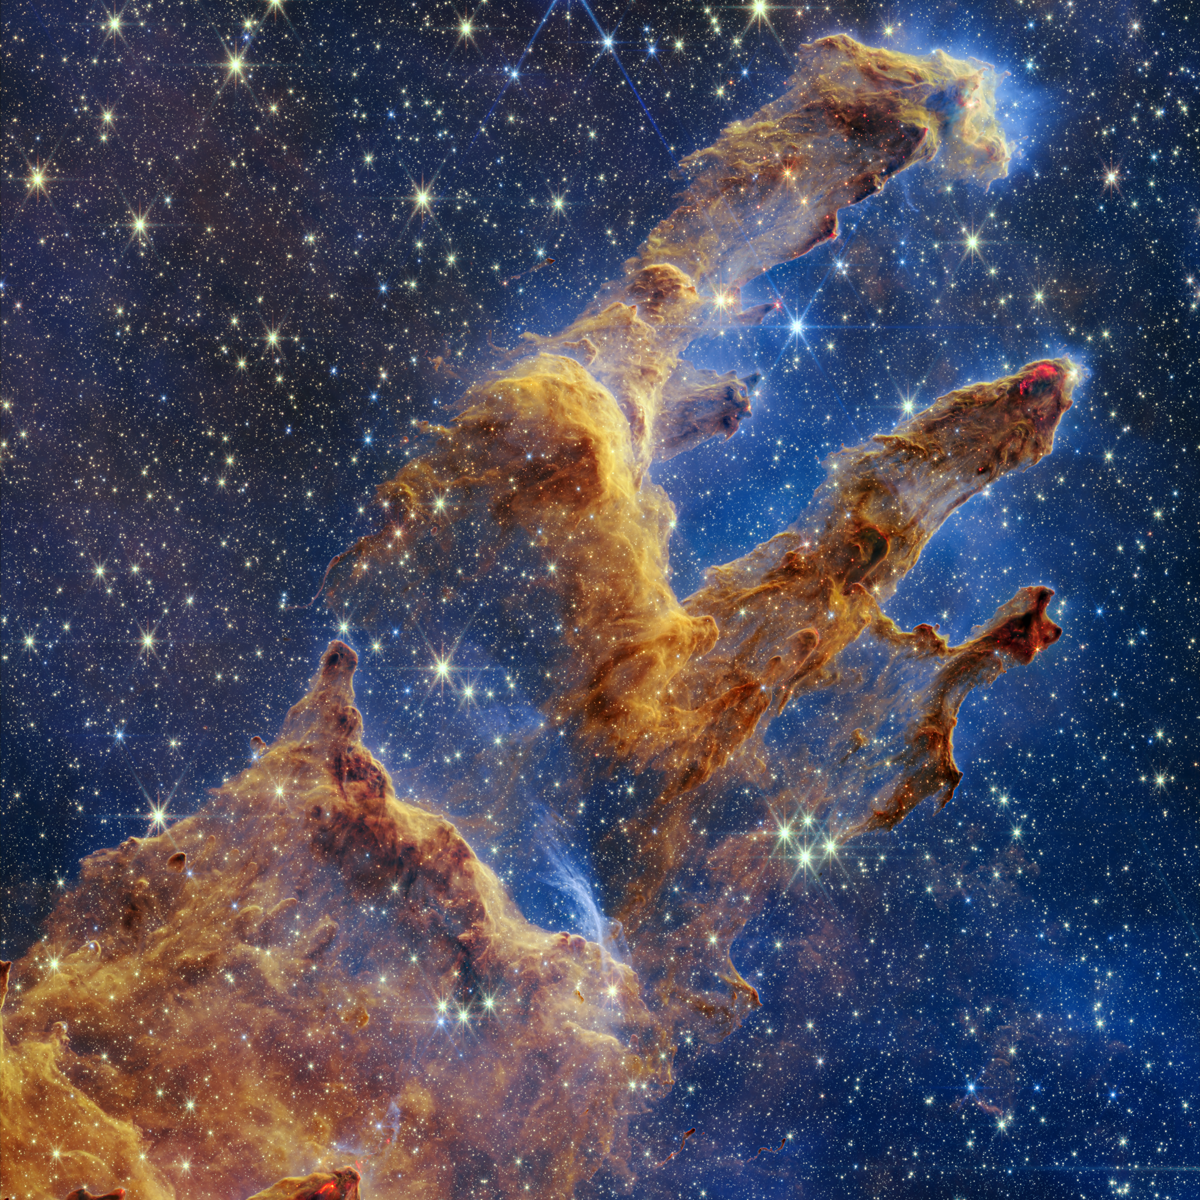

Webb Takes a Stunning, Star-Filled Portrait of the Pillars of Creation (Cropped)

The Pillars of Creation are set off in a kaleidoscope of colour in the NASA/ESA/CSA James Webb Space Telescope’s near-infrared-light view. The pillars look like arches and spires rising out of a desert landscape, but are filled with semi-transparent gas and dust, and ever changing. This is a region where young stars are forming – or have barely burst from their dusty cocoons as they continue to form.

Protostars are the scene-stealers in this Near-Infrared Camera (NIRCam) image. These are the bright red orbs that sometimes appear with eight diffraction spikes. When knots with sufficient mass form within the pillars, they begin to collapse under their own gravity, slowly heat up, and eventually begin shining brightly.

Along the edges of the pillars are wavy lines that look like lava. These are ejections from stars that are still forming. Young stars periodically shoot out jets that can interact within clouds of material, like these thick pillars of gas and dust. This sometimes also results in bow shocks, which can form wavy patterns like a boat does as it moves through water. These young stars are estimated to be only a few hundred thousand years old, and will continue to form for millions of years.

Although it may appear that near-infrared light has allowed Webb to “pierce through” the background to reveal great cosmic distances beyond the pillars, the interstellar medium stands in the way, like a drawn curtain.

This is also the reason why there are no distant galaxies in this view. This translucent layer of gas blocks our view of the deeper universe. Plus, dust is lit up by the collective light from the packed “party” of stars that have burst free from the pillars. It’s like standing in a well-lit room looking out a window – the interior light reflects on the pane, obscuring the scene outside and, in turn, illuminating the activity at the party inside.

Webb’s new view of the Pillars of Creation will help researchers revamp models of star formation. By identifying far more precise star populations, along with the quantities of gas and dust in the region, they will begin to build a clearer understanding of how stars form and burst out of these clouds over millions of years.

The Pillars of Creation is a small region within the vast Eagle Nebula, which lies 6,500 light-years away.

Webb’s NIRCam was built by a team at the University of Arizona and Lockheed Martin’s Advanced Technology Center.

Credit: NASA, ESA, CSA, STScI; J. DePasquale, A. Koekemoer, A. Pagan (STScI).